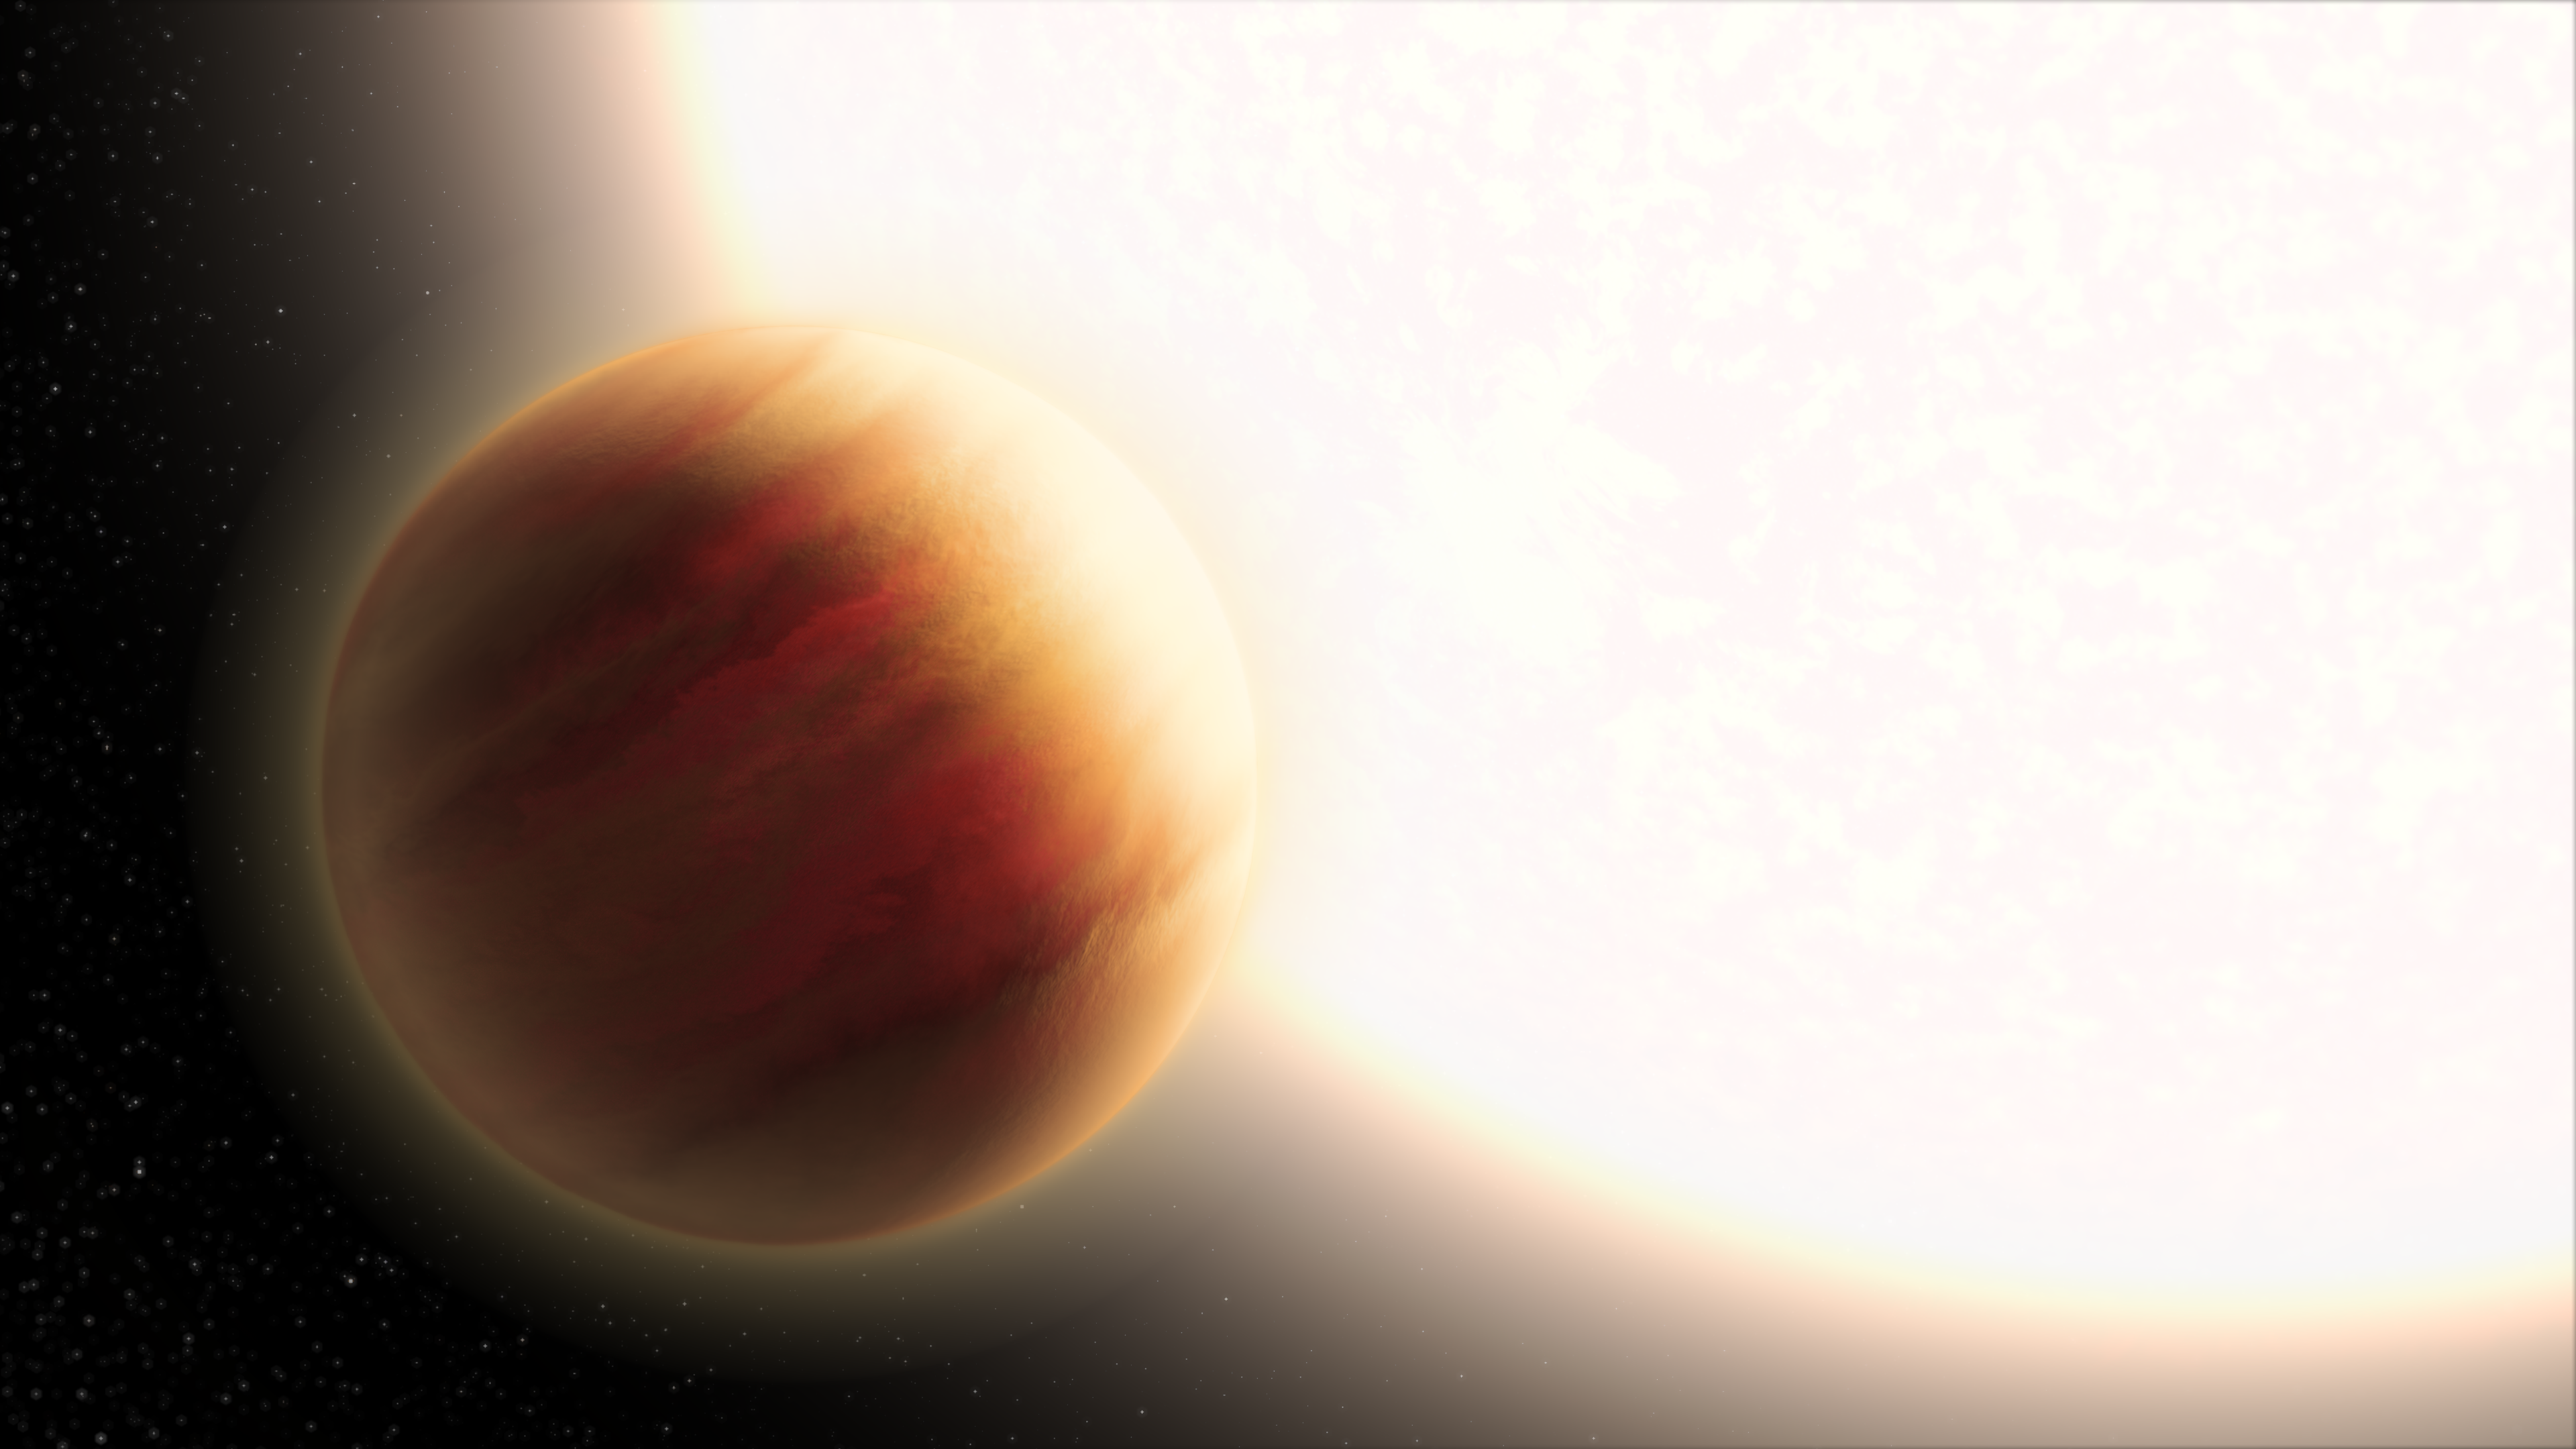

Hubble Probes Exoplanet WASP-79b (Artist’s Impression)

The NASA/ESA Hubble Space Telescope’s data was used to analyze the atmosphere of the super-hot exoplanet WASP-79b, located 780 light-years away in the constellation Eridanus. Among exoplanets, WASP-79b is among the largest ever observed. The planet is larger than Jupiter, and its very deep, hazy atmosphere sizzles at 1,650 degrees Celsius – the temperature of molten glass. The Hubble Space Telescope and other observatories measured how starlight is filtered through the planet's atmosphere, allowing for its chemical composition to be analyzed. Hubble has detected the presence of water vapor.

The surprise in recently published results, is that the planet's sky doesn't have any evidence for an atmospheric phenomenon called Rayleigh scattering, where certain colors of light are dispersed by very fine dust particles in the upper atmosphere. Rayleigh scattering is what makes Earth's skies blue by scattering the shorter (bluer) wavelengths of sunlight.

Because WASP-79b doesn't seem to have this phenomenon, the daytime sky would likely be yellowish, researchers say.

Credit: NASA, ESA, and L. Hustak (STScI)